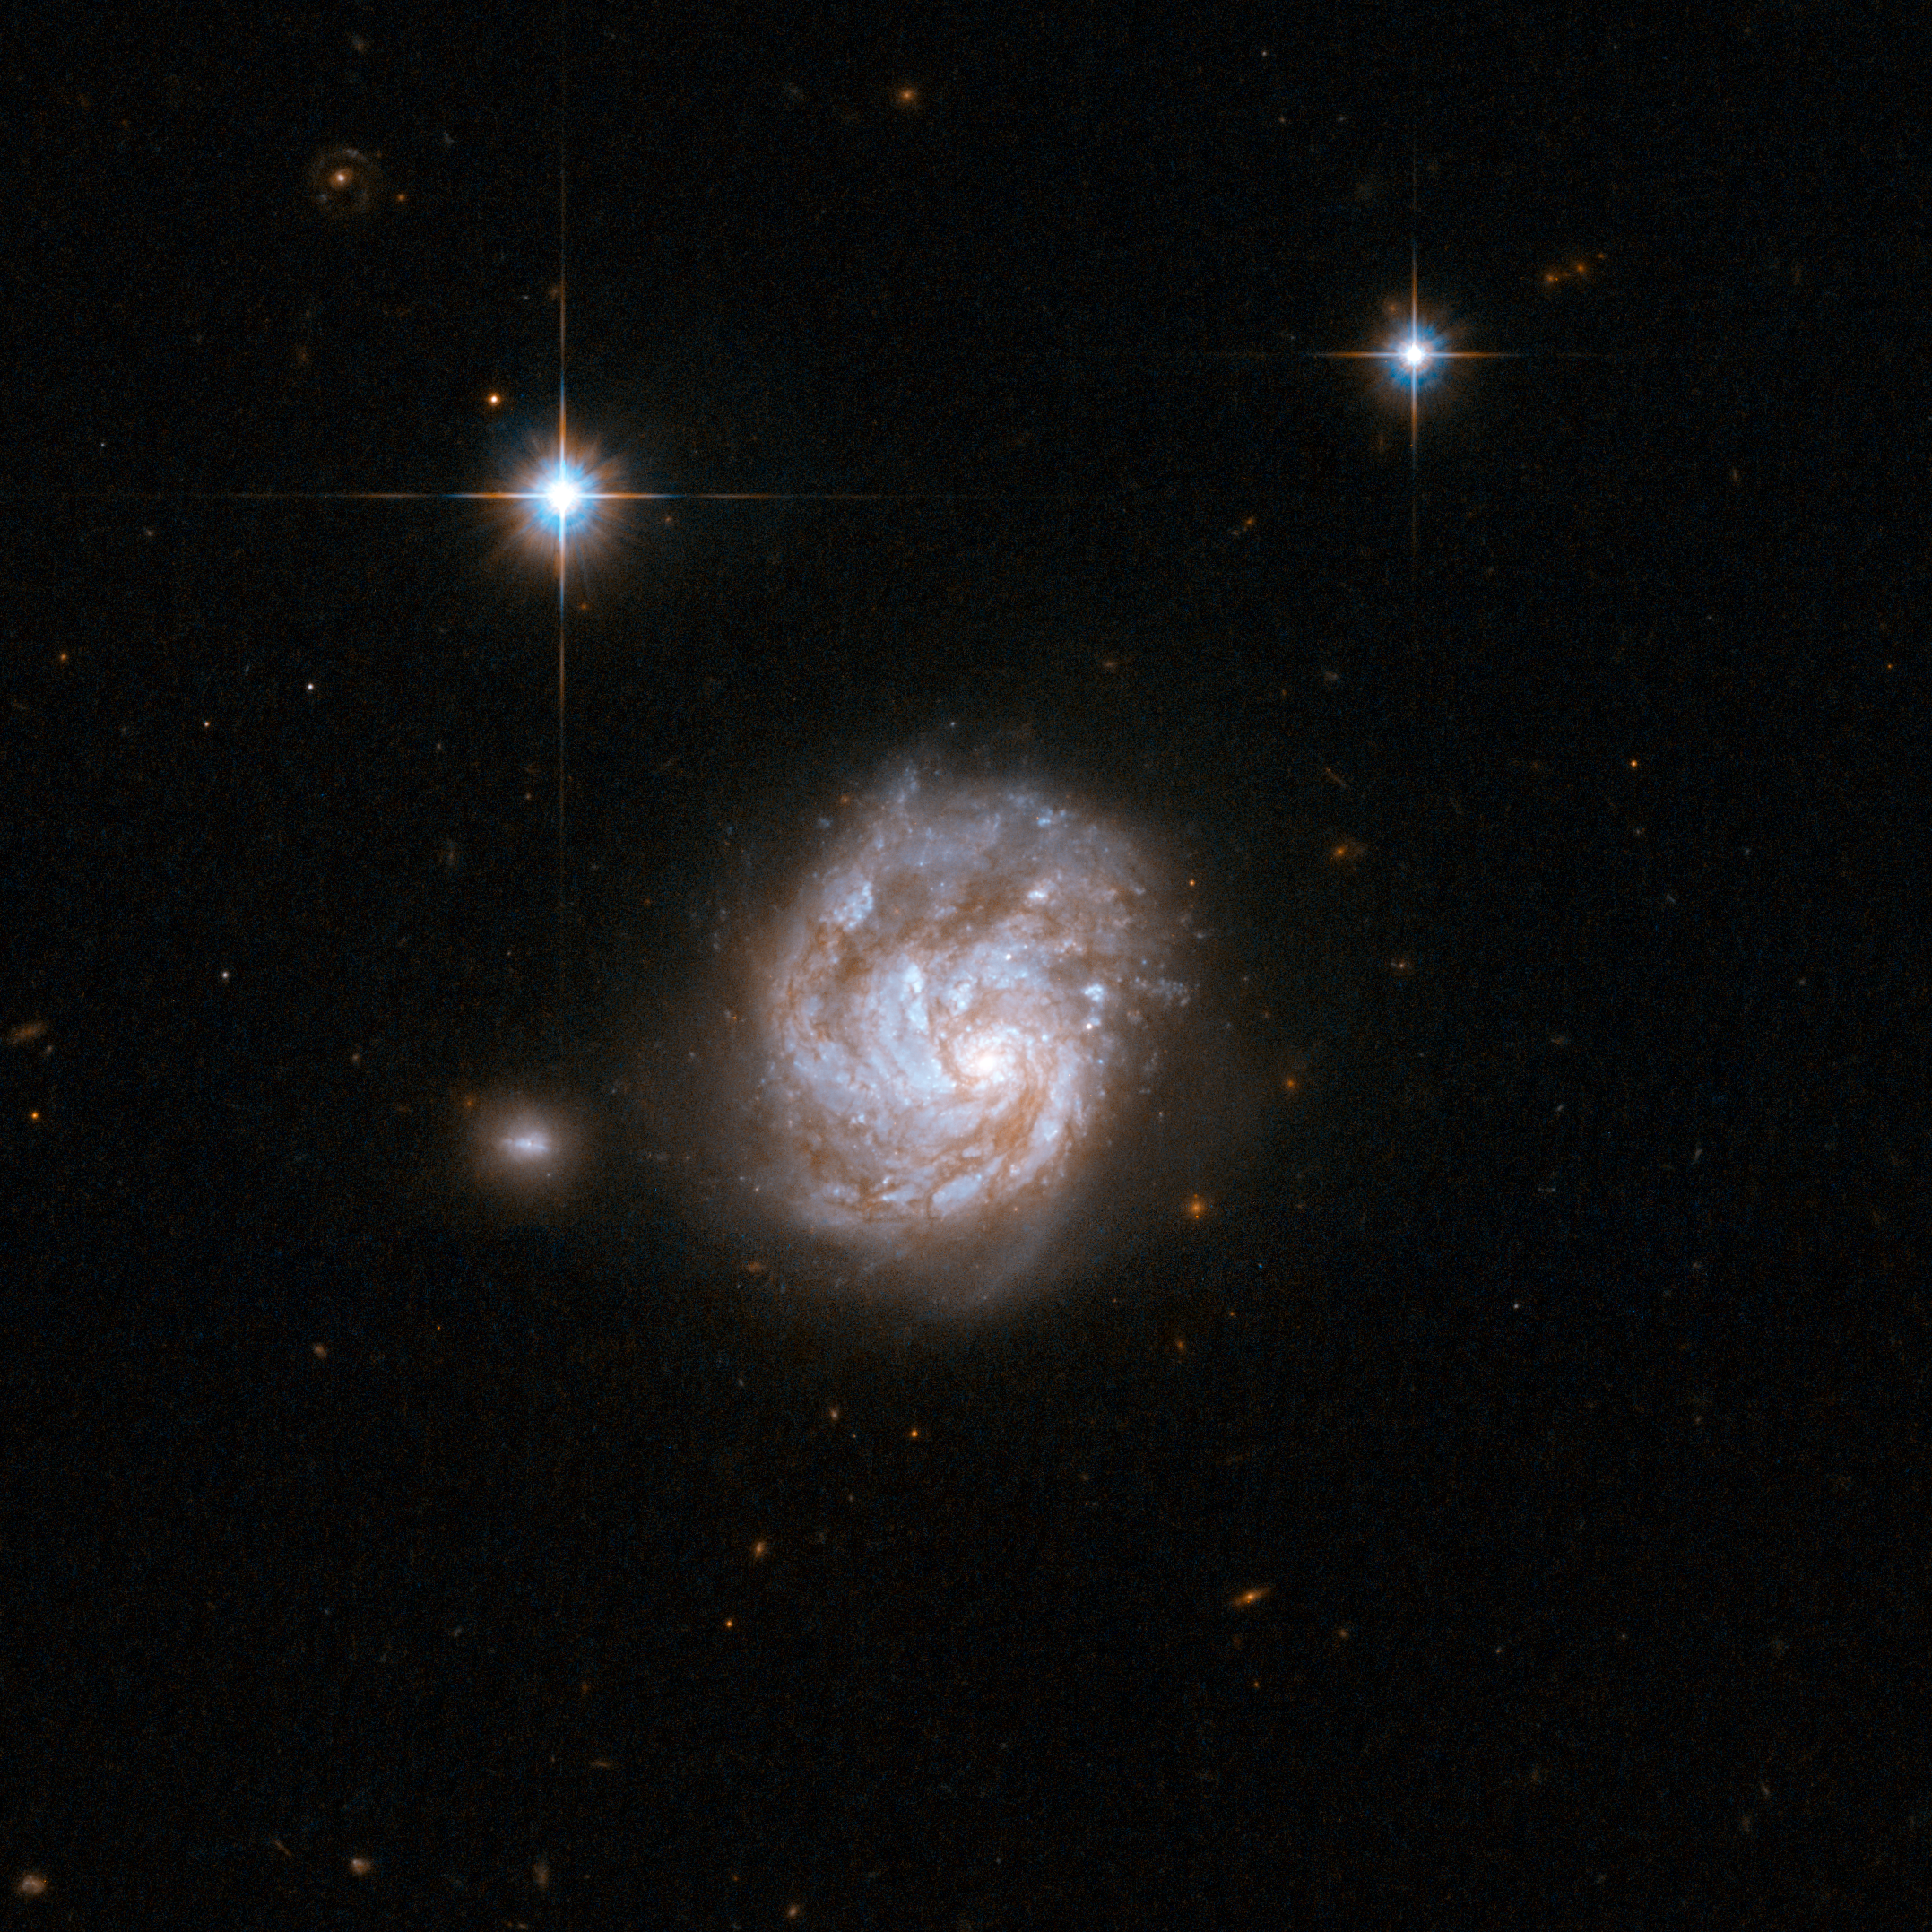

NGC 695

NGC 695 is a peculiar galaxy which looks like a revolving tornado.

It is a disturbed spiral galaxy, seen face-on, with loosely wound spiral arms. Knotty star-forming regions are tangled in a mesh of dust and gas. NGC 695 is in an interaction with a small companion located just outside the image to the left. Scientists believe that this is a recent but relatively weak interaction. NGC 695 is located in the constellation of Aries, the Ram, about 450 million light-years away from Earth.

This image is part of a large collection of 59 images of merging galaxies taken by the Hubble Space Telescope and released on the occasion of its 18th anniversary on 24th April 2008.

Credit: NASA, ESA, the Hubble Heritage Team (STScI/AURA)-ESA/Hubble Collaboration and A. Evans (University of Virginia, Charlottesville/NRAO/Stony Brook University)